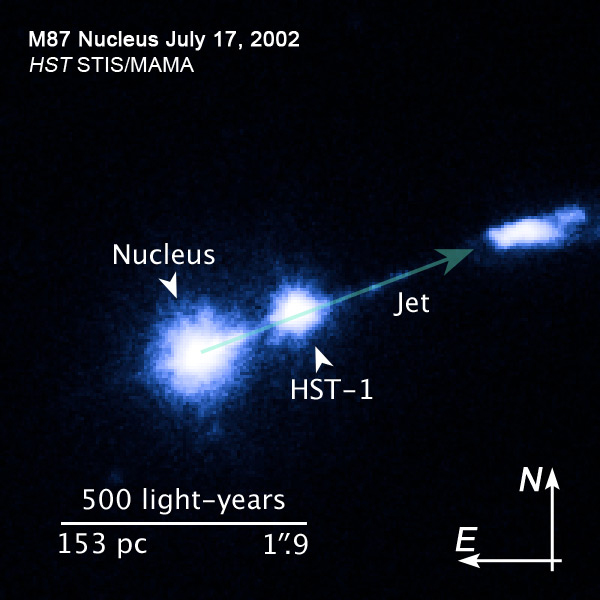

Compass and scale image of M87 jet

M 87 is a supergiant elliptical galaxy, about 55 million light years from Earth. The galaxy has a featureless, ellipsoidal shape and is the second brightest galaxy in the nothern Virgo Cluster.

In the center of the galaxy a supermassive black hole is located, which is also the main component of its active galctic nucleus. Caused by the black hole and its accretion disk a relativistic jet emerges 5000 light years from the nucleus of the galaxy.

Within the Jet the space telescopes Hubble and Spitzer detected a knot, designated HST-1. This knot is about 210 light years from the core. By 2006, the X-ray intensity of this knot had increased by a factor of 50 over a four-year period.

Credit: NASA, ESA and J. Madrid (McMaster University, Canada)